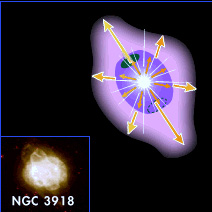

NGC 3918 illustration

Studying planetary nebulae is important to understanding the process of star death. A star begins to die when it has exhausted its thermonuclear fuel - hydrogen and helium. The star then becomes bright and cool (red giant phase) and swells to several tens of times its normal size. It begins puffing thin shells of gas off into space. These shells become the star's cocoon., which are known as plenatery nebula.

This illustration of the planetary nebula NGC 3918 shows how the radiation of the host star creates the oval form of the surrounding shell.

Credit: NASA & ESA